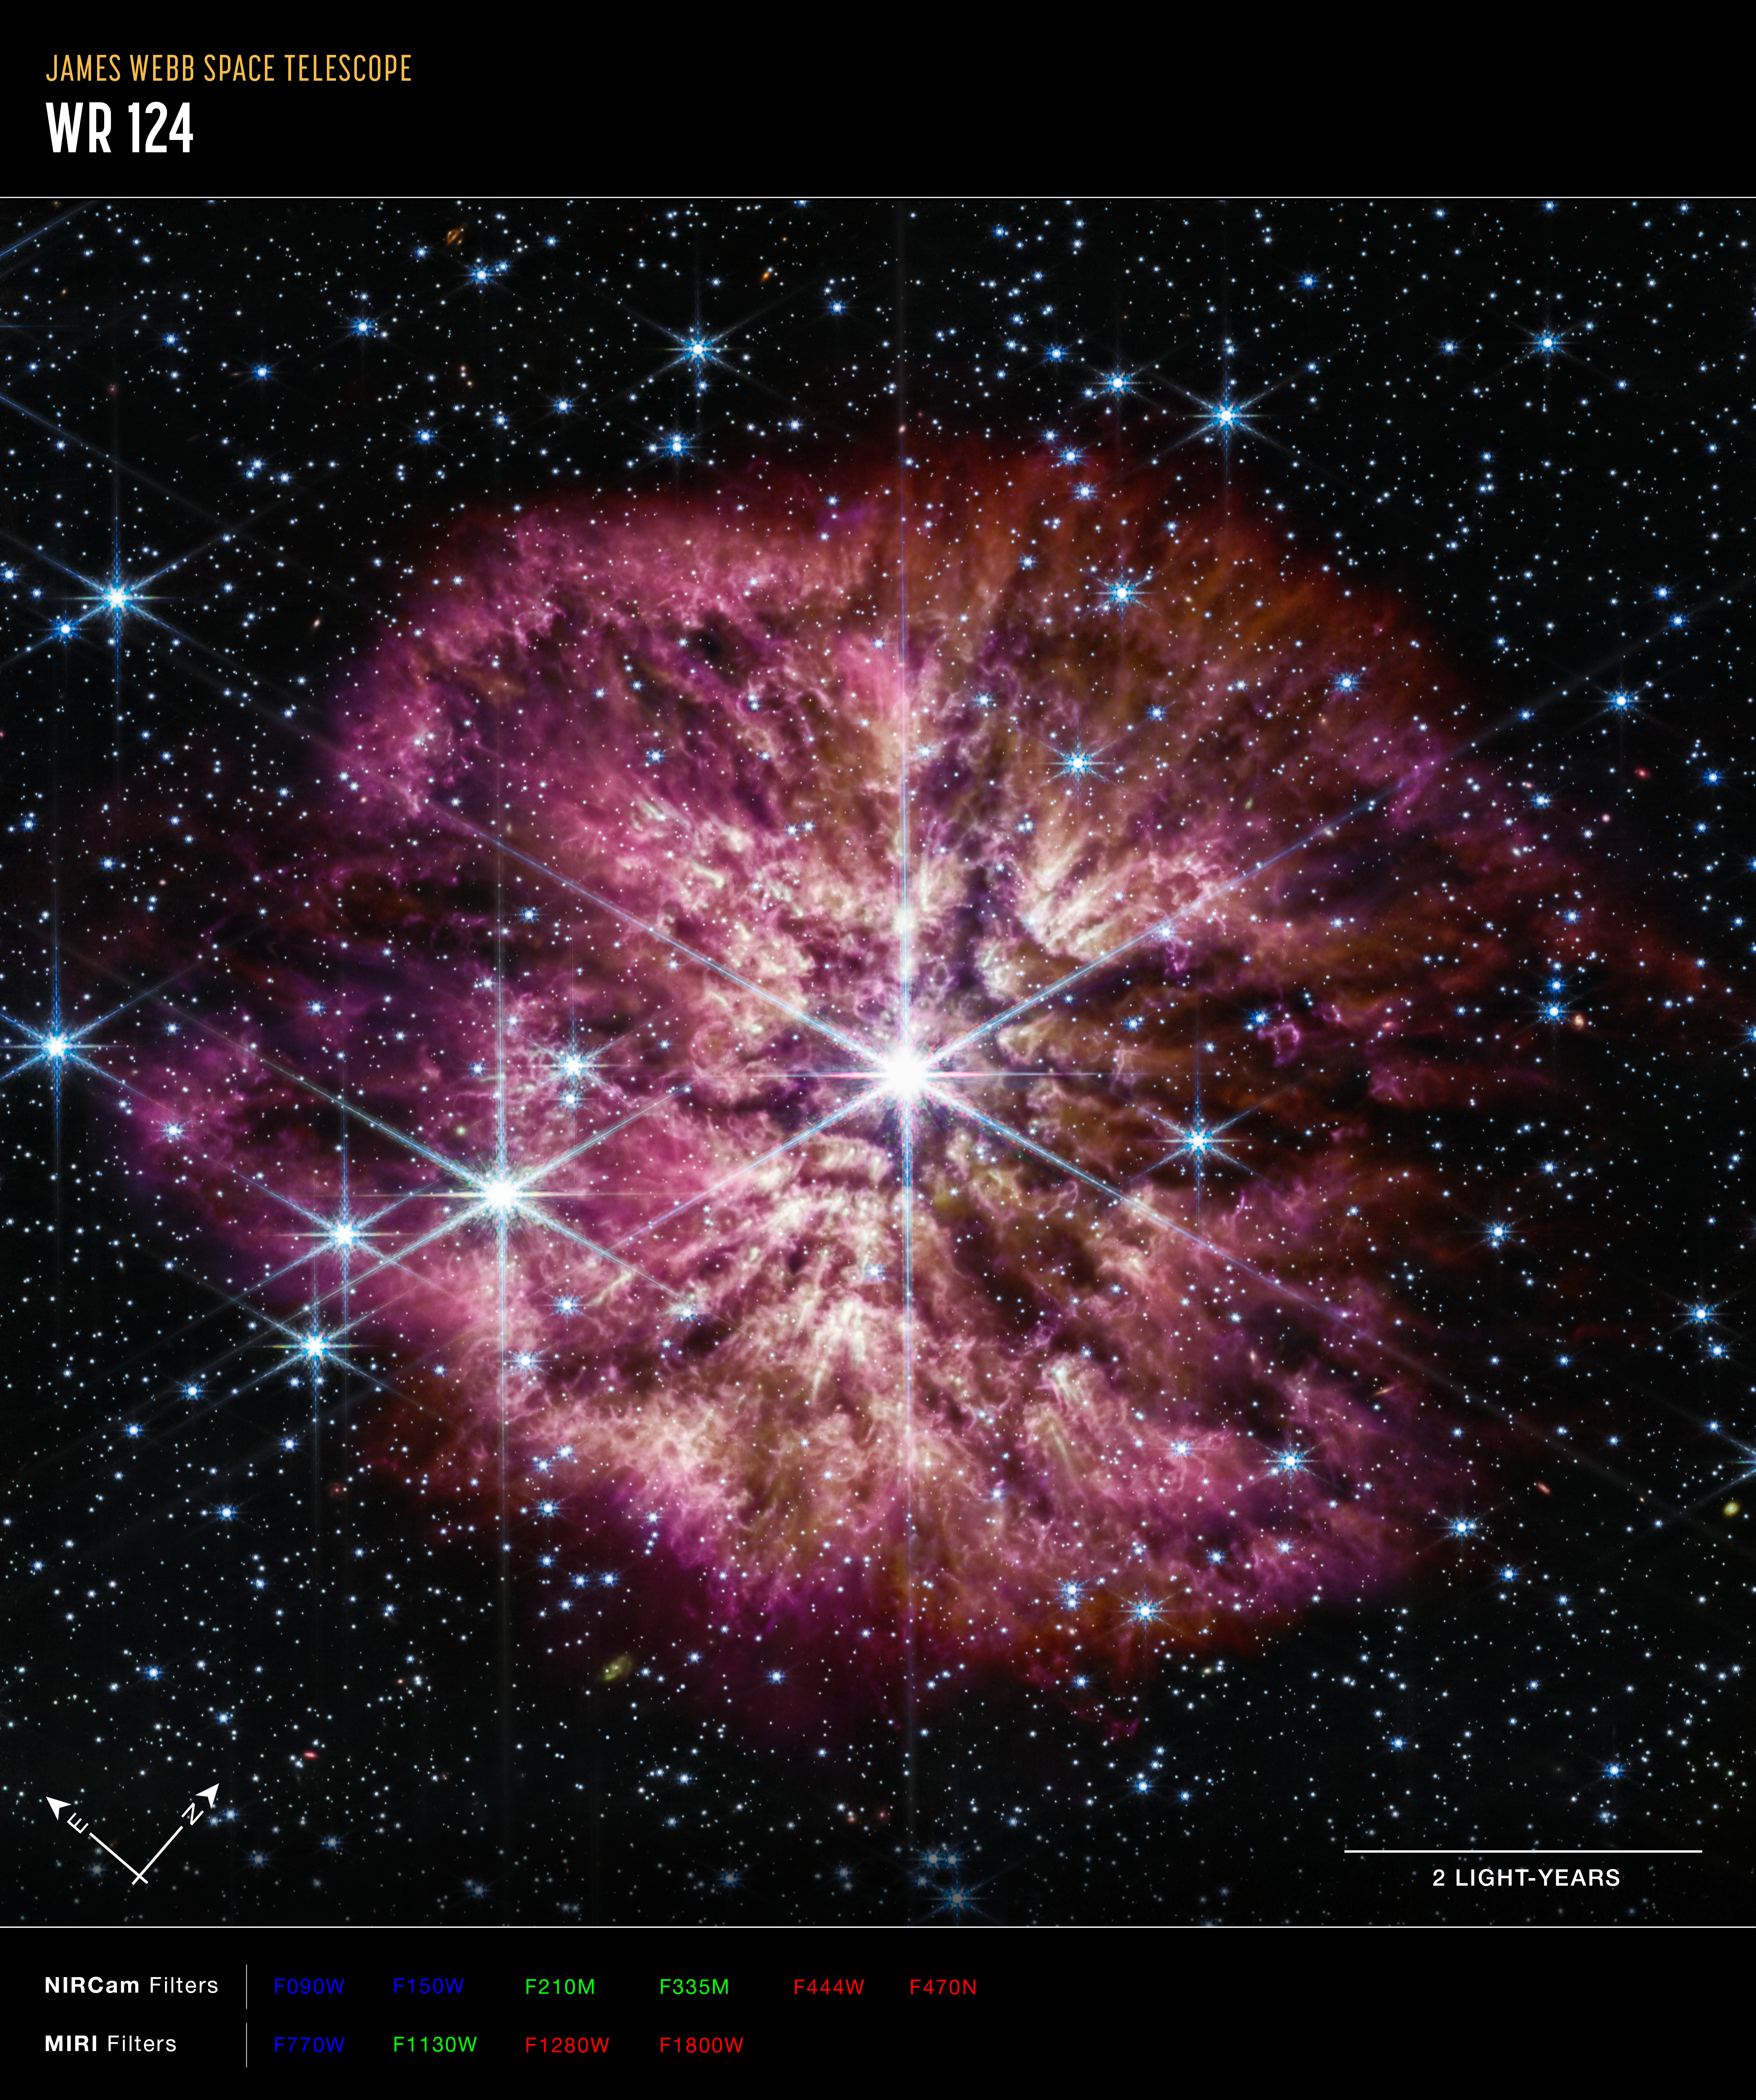

Wolf-Rayet 124 (NIRCam and MIRI composite image - annotated)

The luminous, hot star Wolf-Rayet 124 (WR 124) is prominent at the centre of the NASA/ESA/CSA James Webb Space Telescope’s composite image combining near-infrared and mid-infrared wavelengths of light. The star displays the characteristic diffraction spikes of Webb’s Near-infrared Camera (NIRCam), caused by the physical structure of the telescope itself. NIRCam effectively balances the brightness of the star with the fainter gas and dust surrounding it, while Webb’s Mid-Infrared Instrument (MIRI) reveals the nebula’s structure.

Background stars and galaxies populate the field of view and peek through the nebula of gas and dust that has been ejected from the ageing massive star to span 10 light-years across space. A history of the star’s past episodes of mass loss can be read in the nebula’s structure. Rather than smooth shells, the nebula is formed from random, asymmetric ejections. Bright clumps of gas and dust appear like tadpoles swimming toward the star, their tails streaming out behind them, blown back by the stellar wind.

This image combines various filters from both Webb imaging instruments, with the colour red assigned to wavelengths of 4.44, 4.7, 12.8, and 18 microns (F444W, F470N, F1280W, F1800W), green to 2.1, 3.35, and 11.3 microns (F210M, F335M, F1130W), and blue to 0.9, 1.5, and 7.7 microns (F090W, F150W, F770W).

Credit: NASA, ESA, CSA, STScI, Webb ERO Production Team